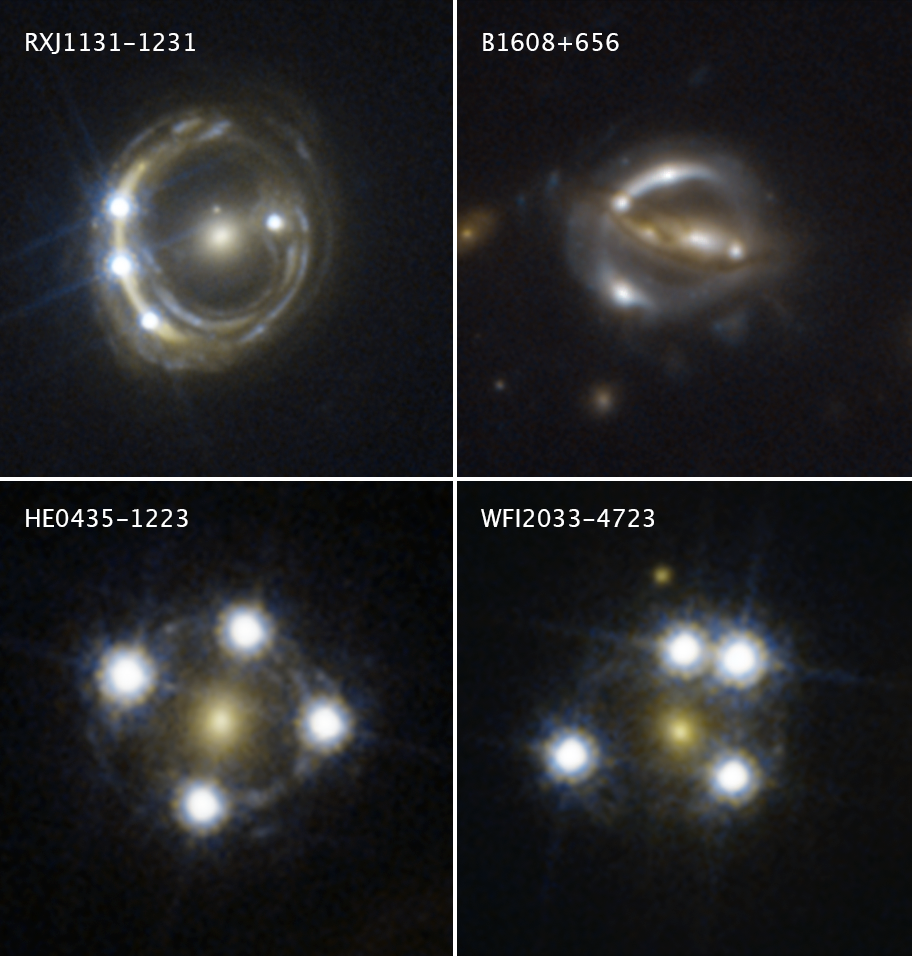

Mosaic of Gravitationally Lensed Quasars

Each of these Hubble Space Telescope snapshots reveals four distorted images of a background quasar surrounding the central core of a foreground massive galaxy.

The multiple quasar images were produced by the gravity of the foreground galaxy, which is acting like a magnifying glass by warping the quasar’s light in an effect called gravitational lensing. Quasars are extremely distant cosmic streetlights produced by active black holes.

The light rays from each lensed quasar image take a slightly different path through space to reach Earth. The pathway’s length depends on the amount of matter that is distorting space along the line of sight to the quasar. To trace each pathway, the astronomers monitor the flickering of the quasar’s light as its black hole gobbles up material. When the light flickers, each lensed image brightens at a different time. This flickering sequence allows researchers to measure the time delays between each image as the lensed light travels along its path to Earth.

These time-delay measurements helped astronomers calculate how fast the universe is growing, a value called the Hubble constant.

The Hubble images were taken between 2003 and 2004 with the Advanced Camera for Surveys.

Credit: NASA, ESA, S.H. Suyu (Max Planck Institute for Astrophysics, Technical University of Munich, and Academia Sinica Institute of Astronomy and Astrophysics), and K.C. Wong (University of Tokyo’s Kavli Institute for the Physics and Mathematics of the Universe)